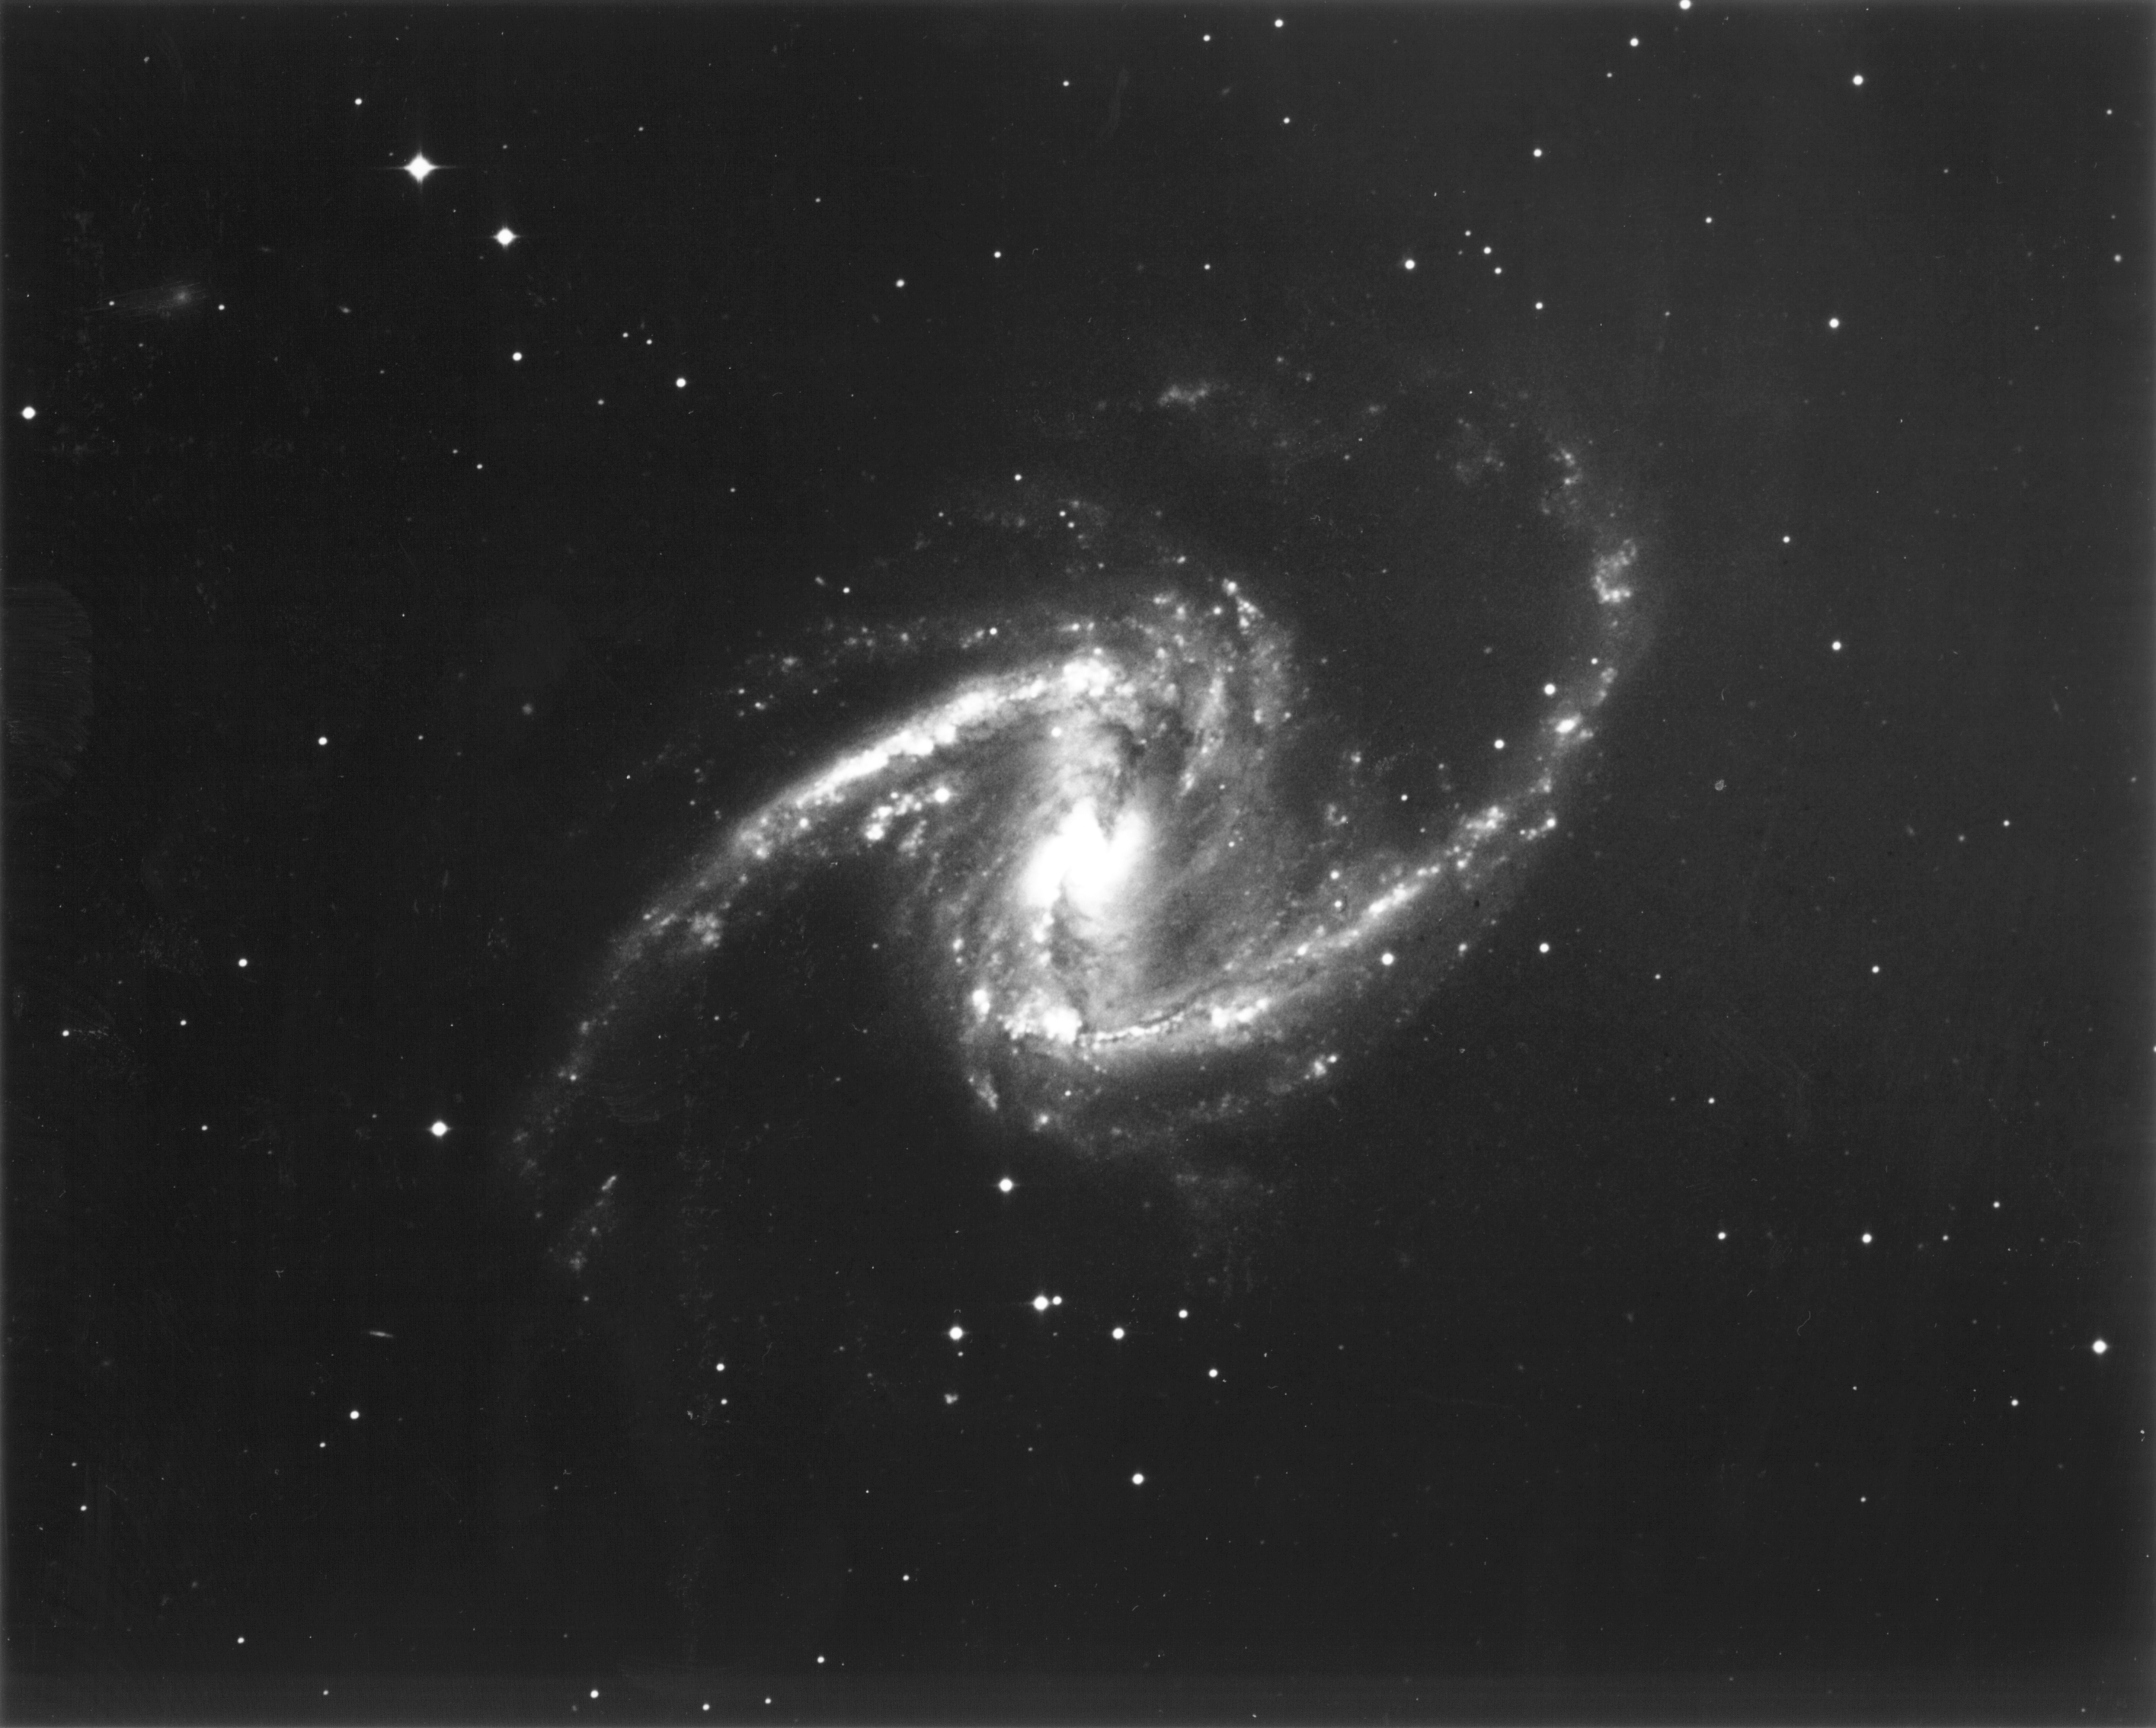

Galaxy NGC 1365

This black and white photograph from a ground-based telescope shows the entire galaxy, which is visible from the Southern Hemisphere.

Credit: W. Freedman (Carnegie Observatories), the Hubble Space Telescope Key Project team, and NASA/ESA